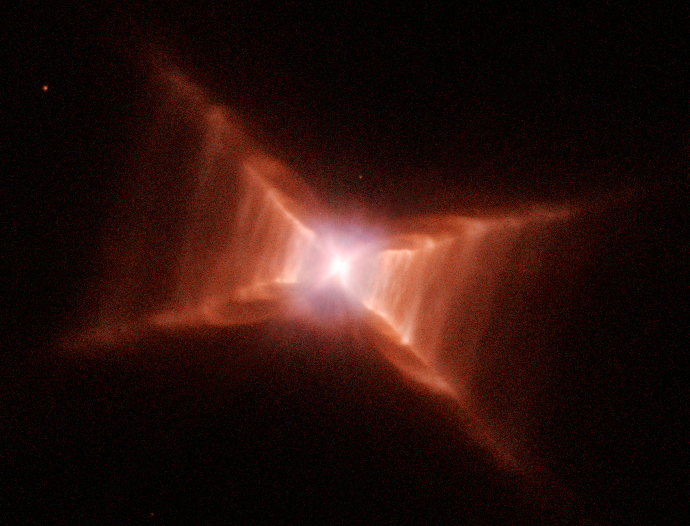

The remarkable Red Rectangle: Stairway to heaven?

This image, taken with the NASA/ESA Hubble Space Telescope, reveals startling new details of one of the most unusual nebulae known in our Galaxy. Catalogued as HD 44179, this nebula is more commonly called the "Red Rectangle" because of its unique shape and colour as seen with ground-based telescopes.

Hubble has revealed a wealth of new features in the Red Rectangle that cannot be seen by ground-based telescopes looking through the Earth's turbulent atmosphere. Details of the Hubble study were published in the April 2004 issue of The Astronomical Journal.

Credit: NASA/ESA, Hans Van Winckel (Catholic University of Leuven, Belgium) and Martin Cohen (University of California, USA)